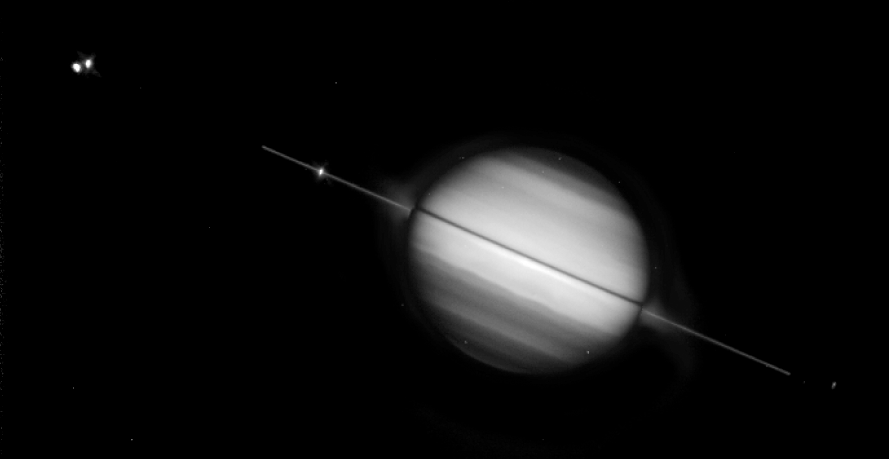

Saturn's rings edge-on

Saturn's magnificent ring system is seen tilted edge-on -- for the second time this year -- in this Hubble Space Telescope picture taken on August 10, 1995, when the planet was 895 million miles (1, 440 million kilometers) away.

Credit: Phil Nicholson (Cornell University) and NASA/ESA